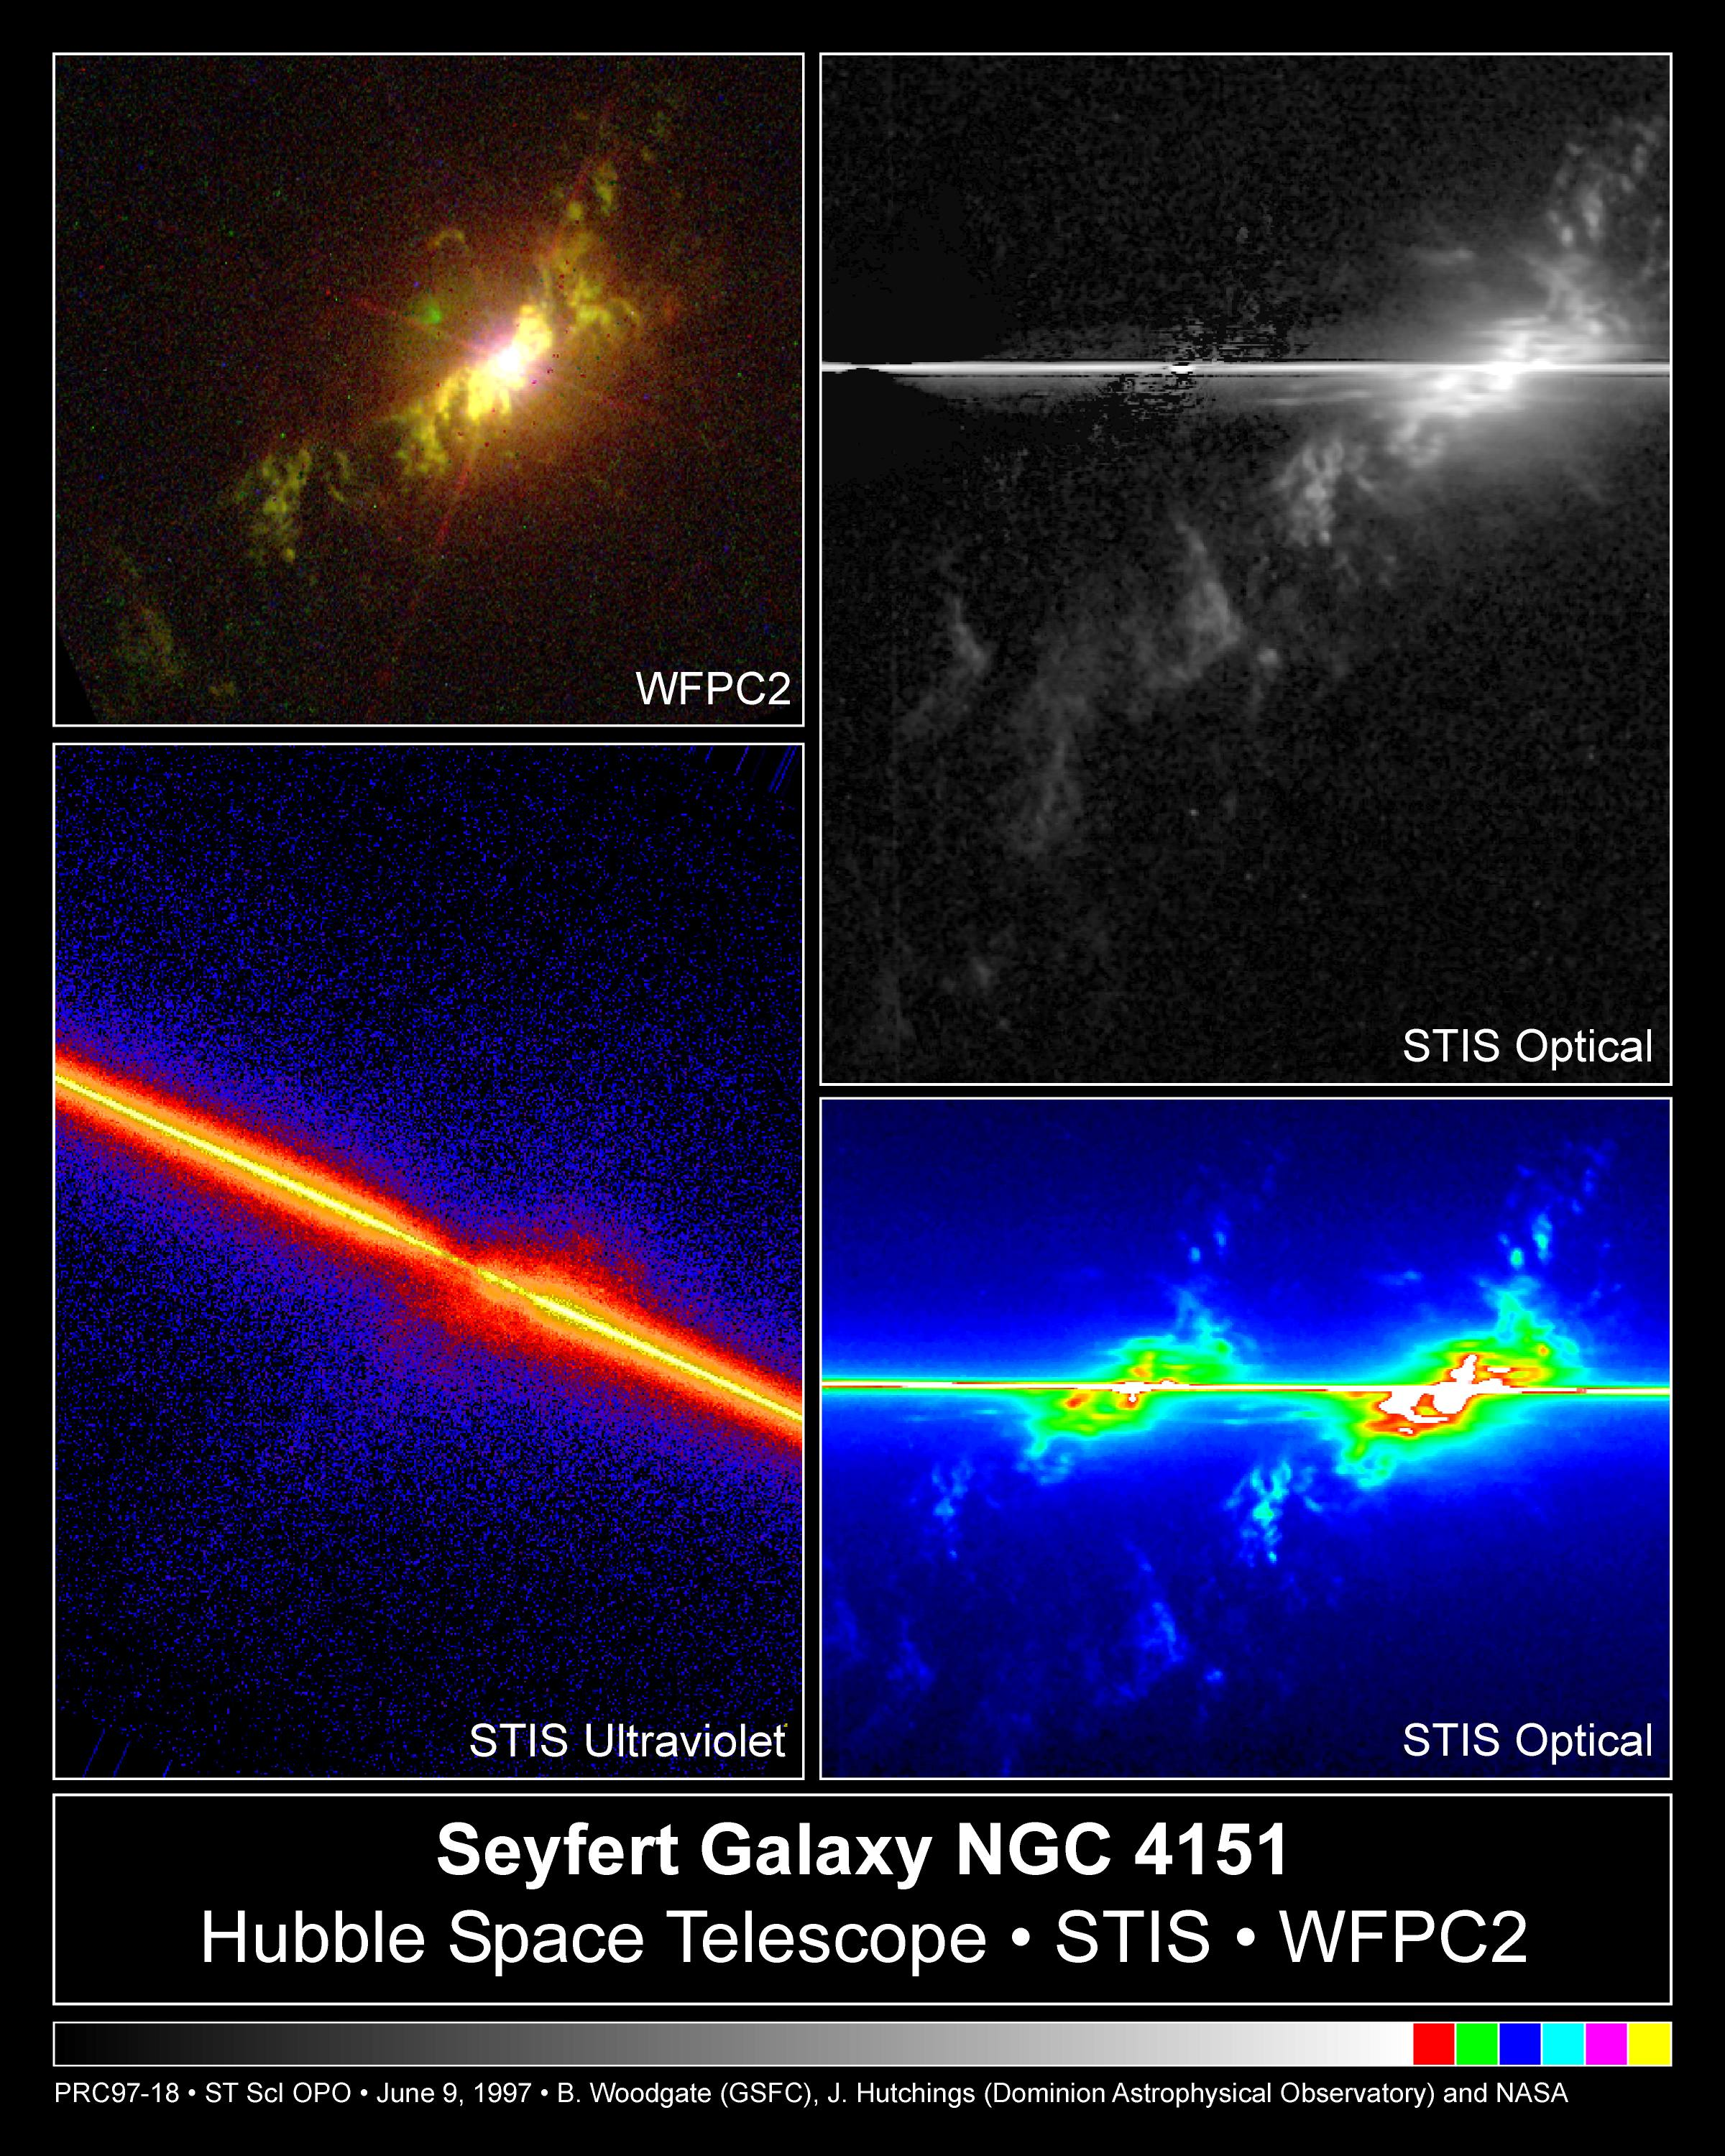

Fireworks near galaxy NGC 4151

The Space Telescope Imaging Spectrograph (STIS) simultaneously records, in unprecedented detail, the velocities of hundreds of gas knots streaming at hundreds of thousands of miles (or kilometres) per hour from the nucleus of NGC 4151, thought to house a supermassive black hole.

This is the first time the velocity structure in the heart of this object, or similar objects, has been mapped so vividly this close to its central black hole.

Credit: John Hutchings (Dominion Astrophysical Observatory), Bruce Woodgate (GSFC/NASA/ESA), Mary Beth Kaiser (Johns Hopkins University), Steven Kraemer(Catholic University of America), and the STIS Team